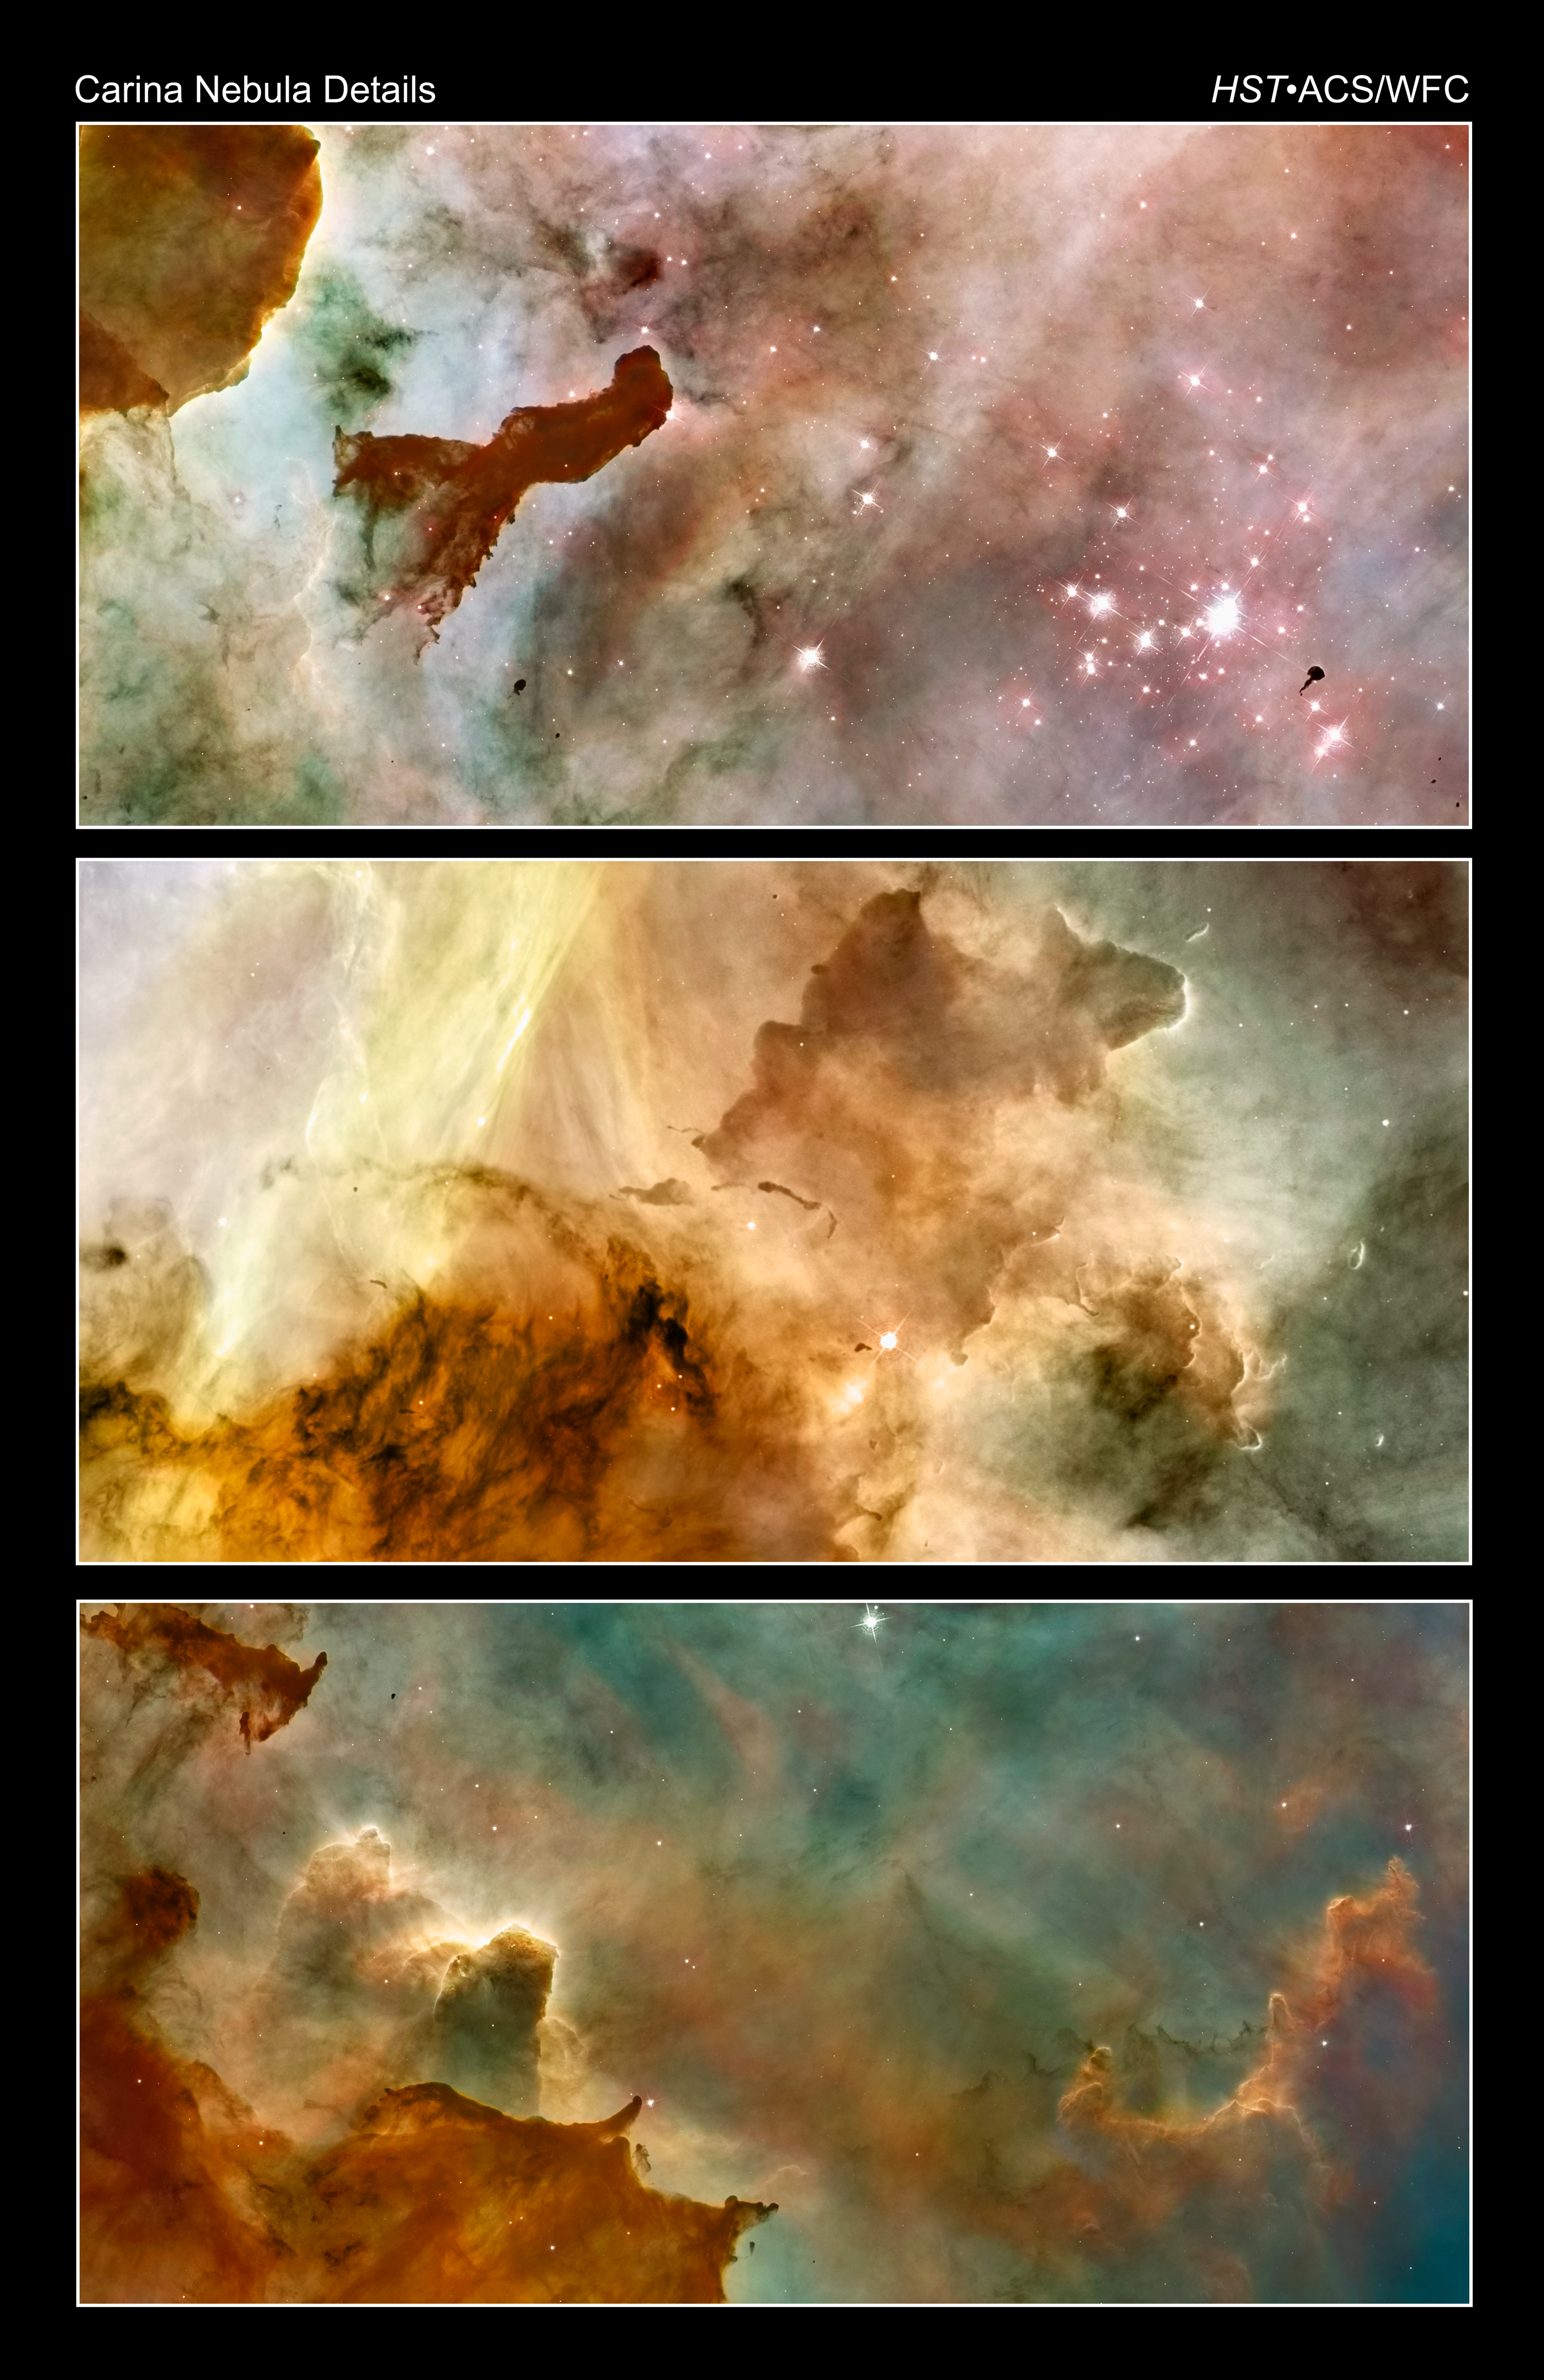

Carina Nebula landscapes

[top] - An approximately one-light-year tall "pillar" of cold hydrogen towers above the wall of the molecular cloud. The 2.5-million-year-old star cluster called Trumpler 14 appears at the right side of the image. A small nugget of cold molecular hydrogen, called a Bok globule, is silhouetted against the star cluster.

[middle] - Detailed view of the central portion of the Carina Nebula near the so-called Keyhole Nebula.

[bottom] - These great clouds of cold hydrogen resemble summer afternoon thunderheads. They tower above the surface of a molecular cloud on the edge of the nebula. So-called "elephant trunk" pillars resist being heated and eaten away by blistering ultraviolet radiation from the nebula's brightest stars.

Credit: NASA, ESA, N. Smith (University of California, Berkeley), and The Hubble Heritage Team (STScI/AURA)